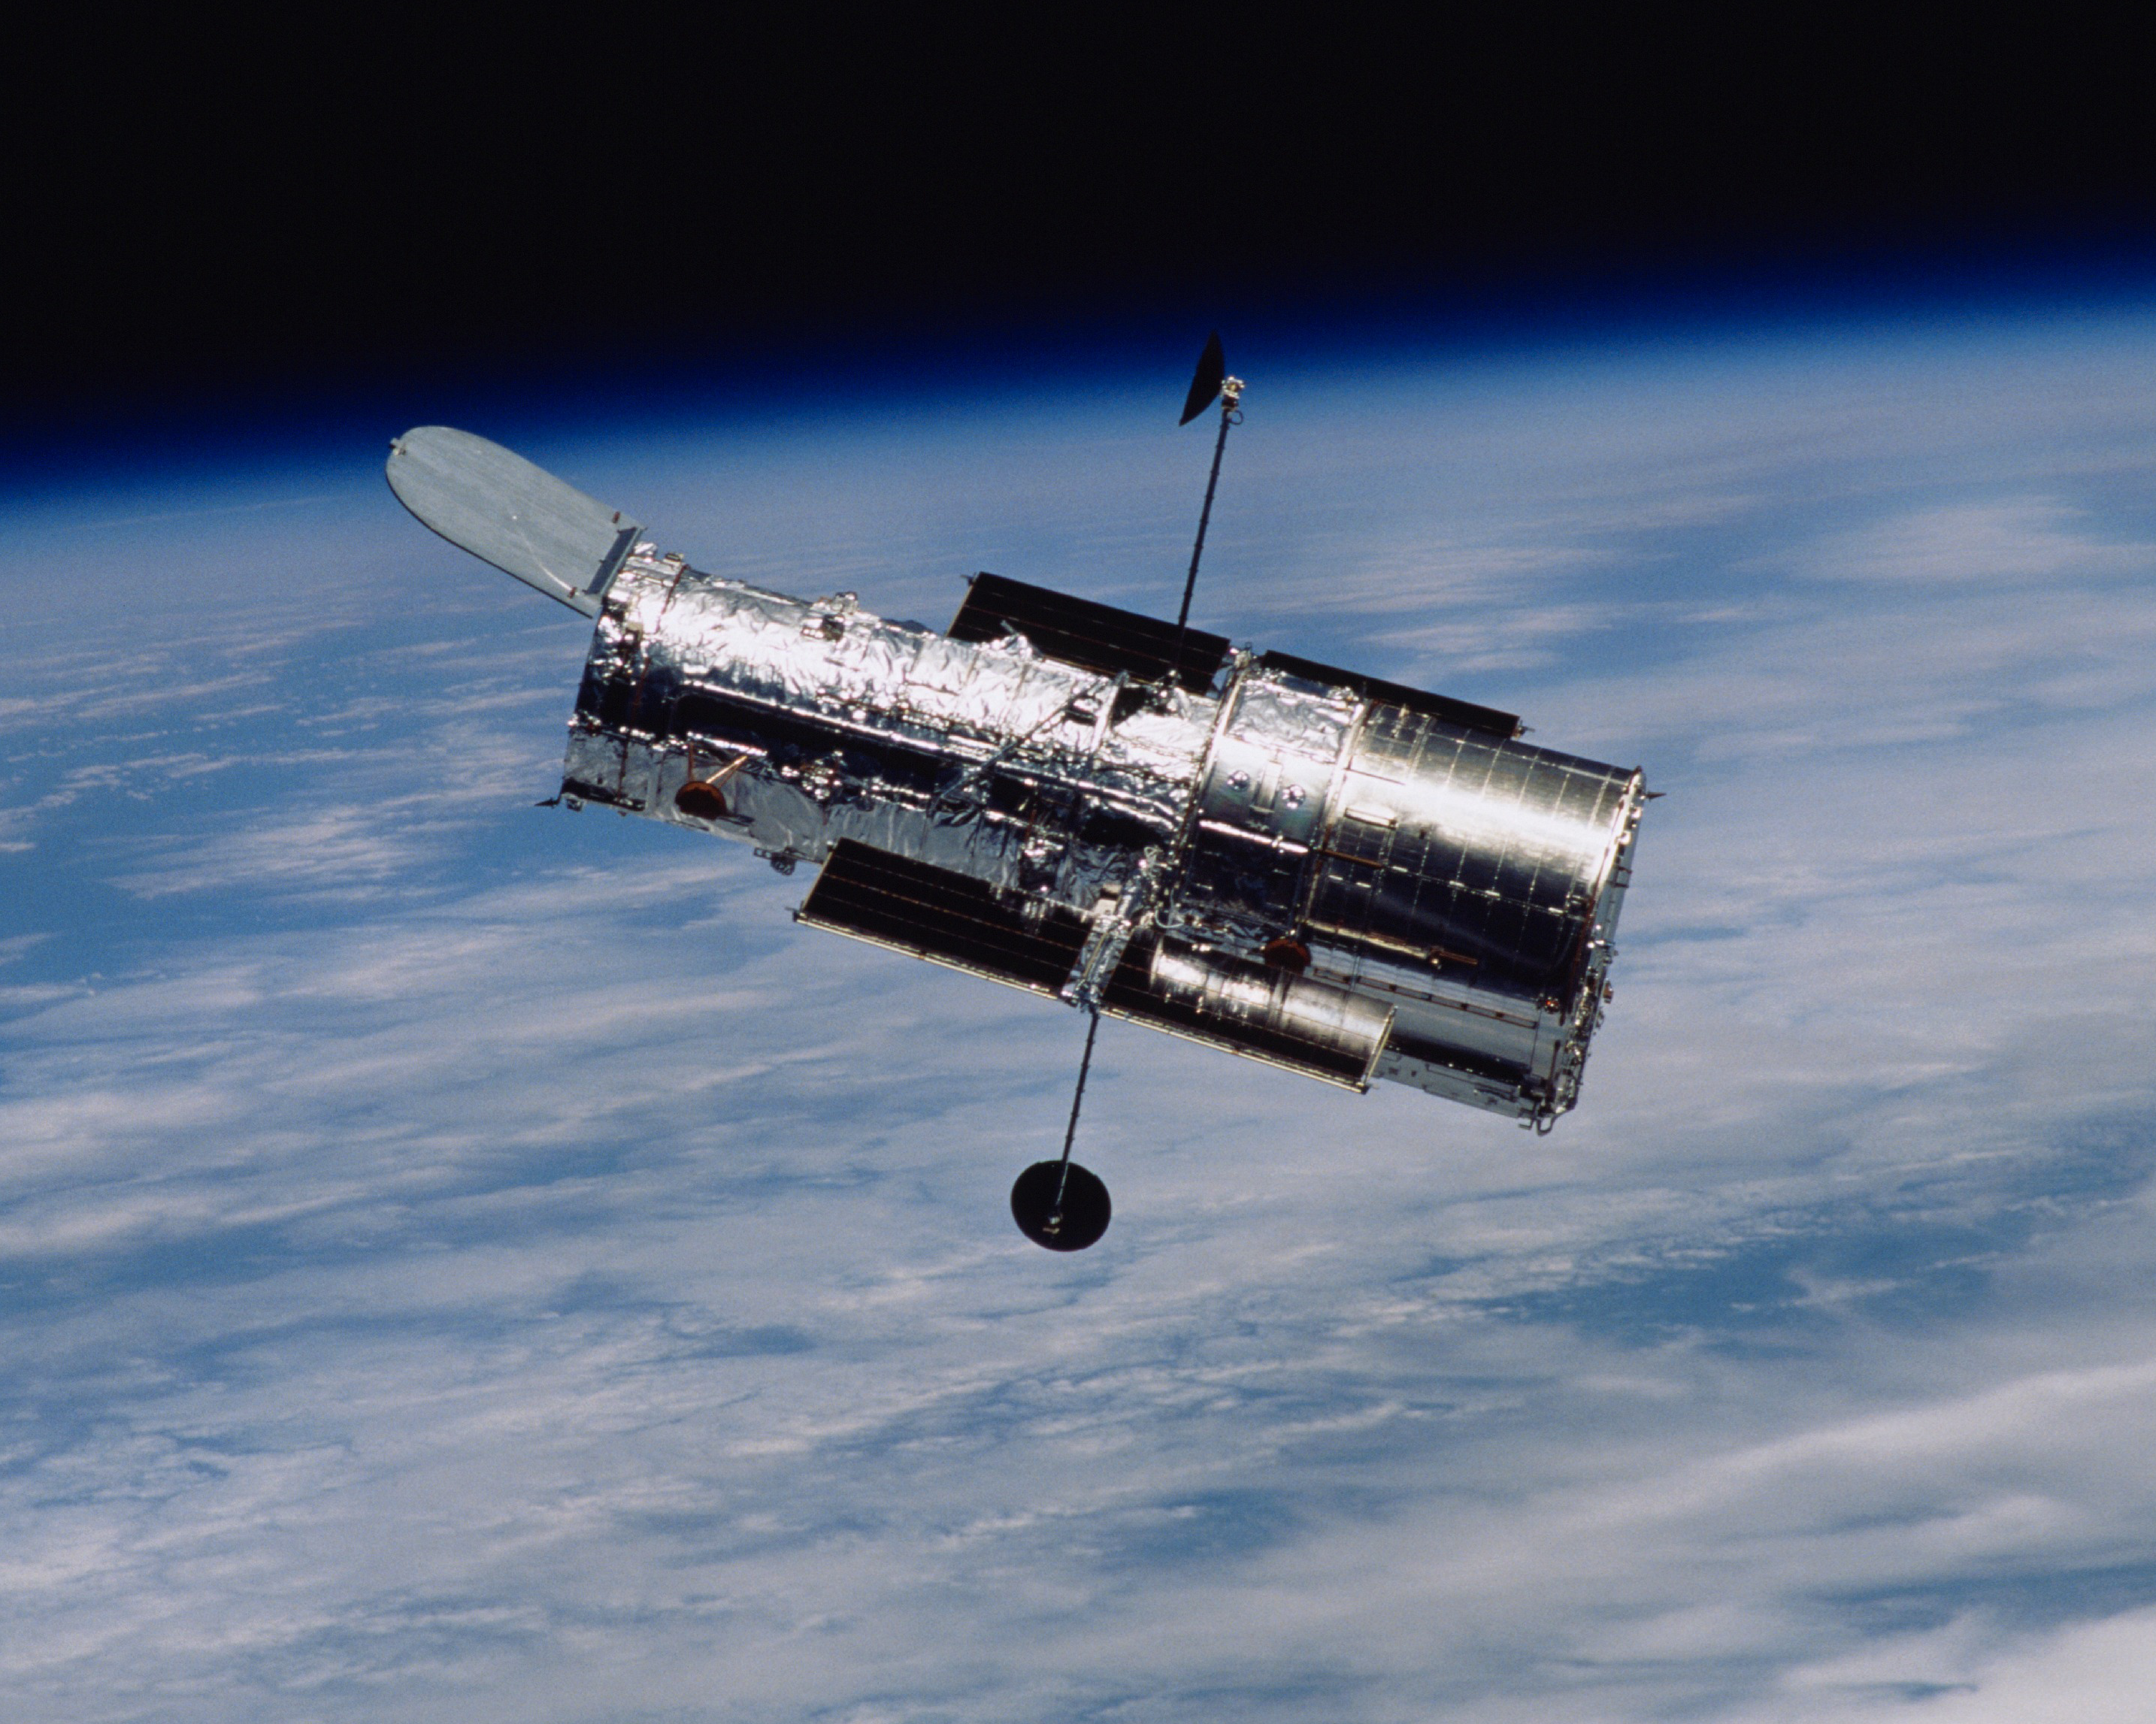

Hubble Space Telescope Begins "Two-Gyro" Science Operations

NASA/ESA Hubble Space Telescope entered a new era of science operations this week, when engineers shut down one of the three operational Gyroscopes aboard the observatory. The two-gyro mode is expected to preserve the operating life of the third gyro and extend Hubble's science observations through mid-2008, an eight-month extension. Backdropped by the horizon of the blue and white Earth and the blackness of space, the Hubble Space Telescope floats gracefully after the release from the Space Shuttle's robotic arm at the close of a successful servicing mission in March of 2002.

Credit: STScI and NASA